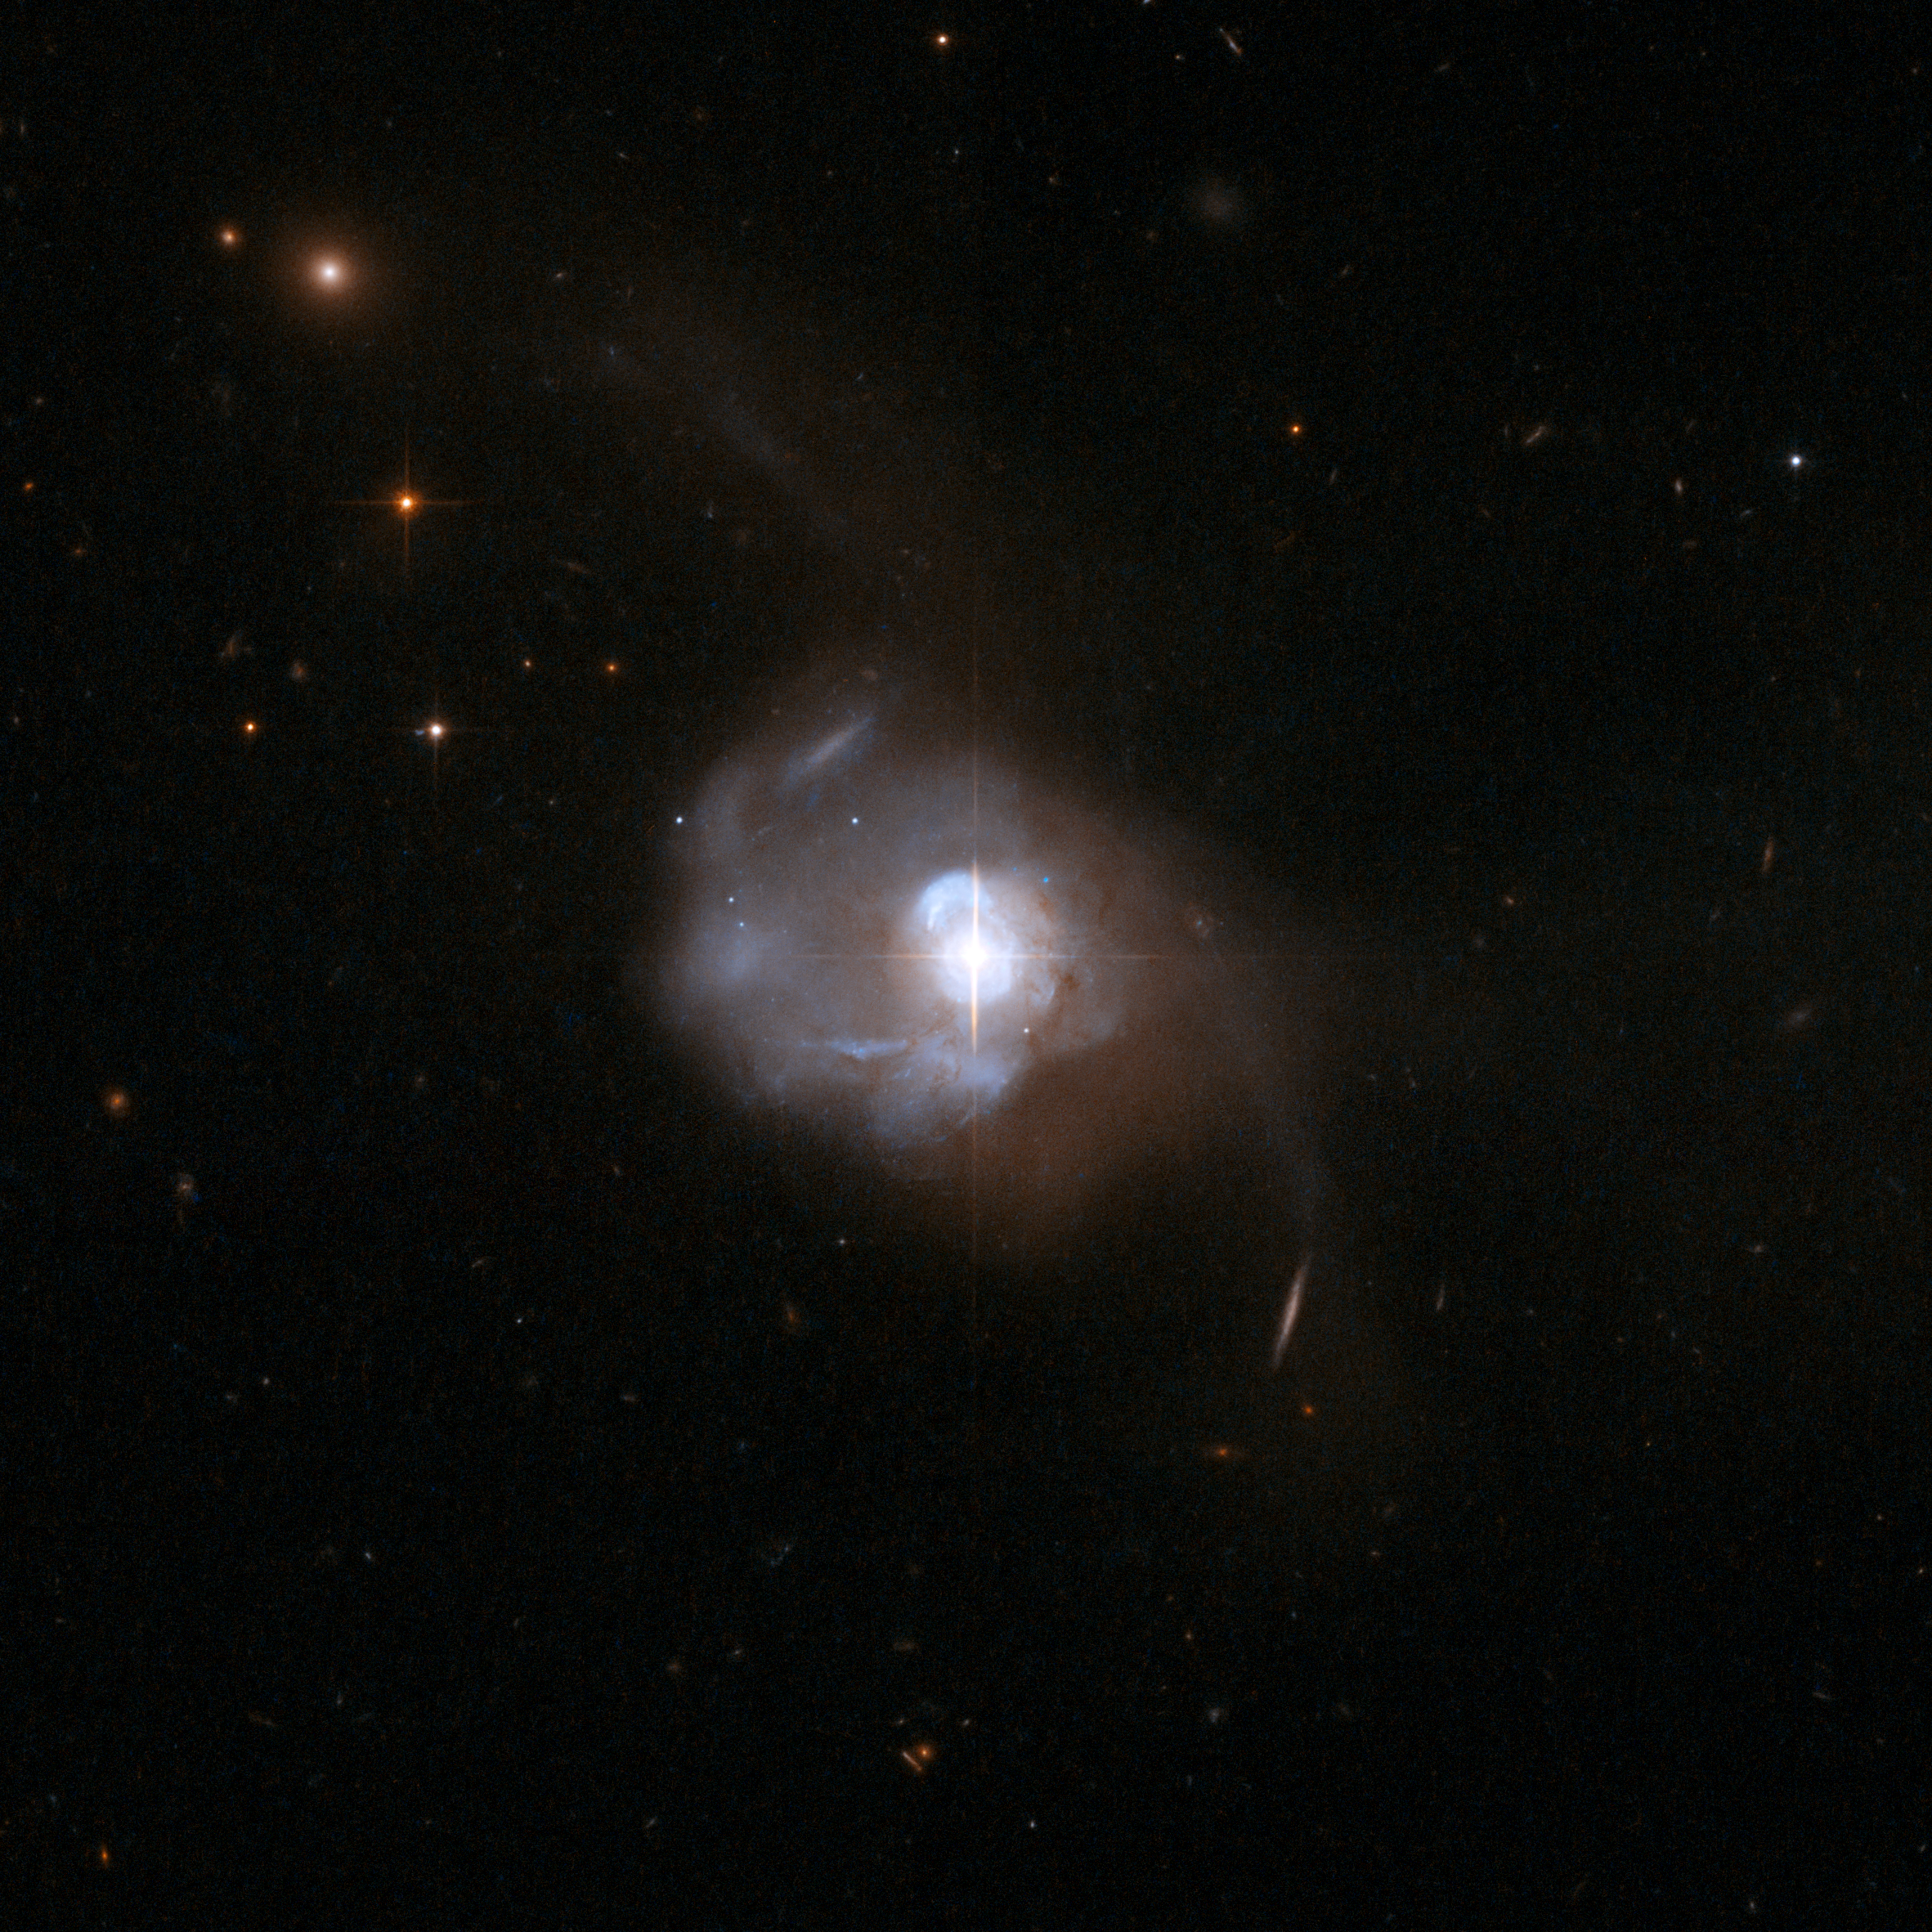

Markarian 231, host galaxy of double black hole

This Hubble Space Telescope image reveals a bright starlike glow in the center of the interacting galaxy Markarian 231, the nearest quasar to Earth. Located 600 million light-years away, we are seeing the galaxy as it looked before multicelled life first appeared on Earth. Quasars are powered by a central black hole that heats the gas around it to unleash tremendous amounts of energy. Hubble spectroscopic observations infer the presence of two supermassive black holes whirling around each other. Because such a dynamic-duo pair are found in the nearest quasar, it would imply that many quasars host binary-black-hole systems. It would be a natural result of a galaxy merger.

Credit: NASA, ESA, the Hubble Heritage Team (STScI/AURA)-ESA/Hubble Collaboration, and A. Evans (University of Virginia, Charlottesville/NRAO/Stony Brook University)